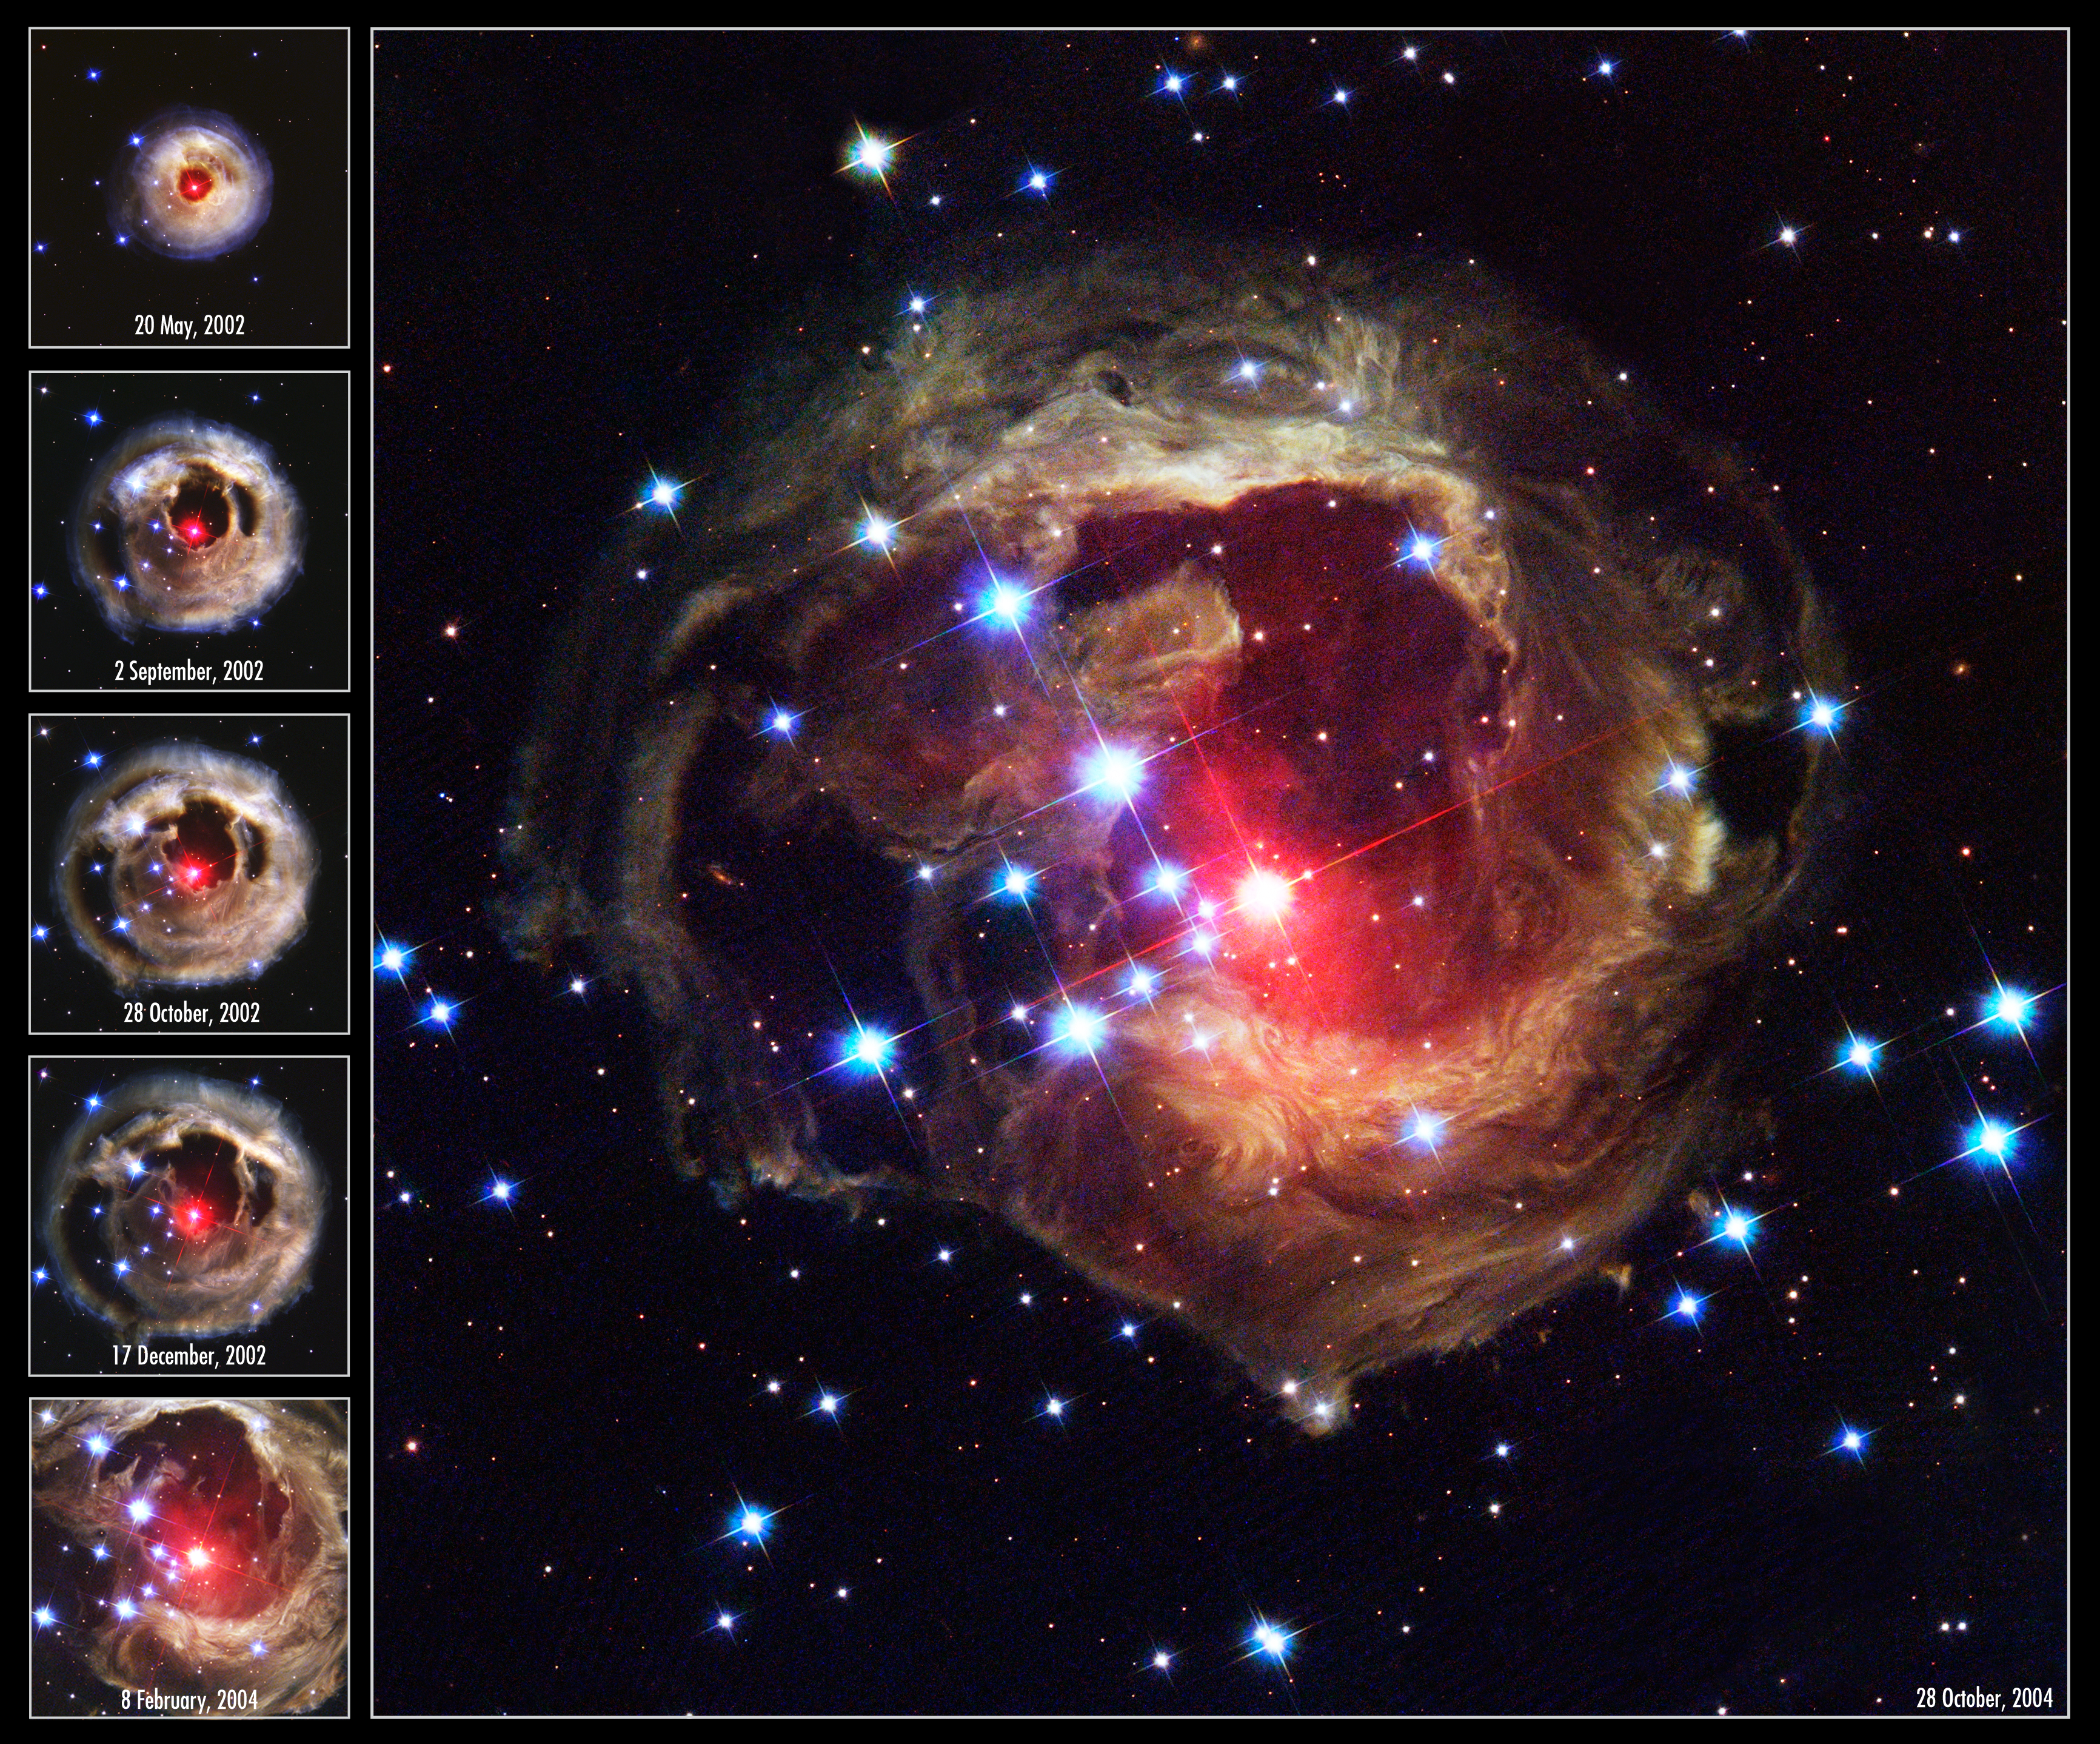

V838 outburst

The Hubble Space Telescope's latest image of the star V838 Monocerotis (V838 Mon) reveals dramatic changes in the illumination of surrounding dusty cloud structures. The effect, called a light echo, has been unveiling never-before-seen dust patterns ever since the star suddenly brightened for several weeks in early 2002.

Credit: NASA, ESA, and The Hubble Heritage Team (AURA/STScI)